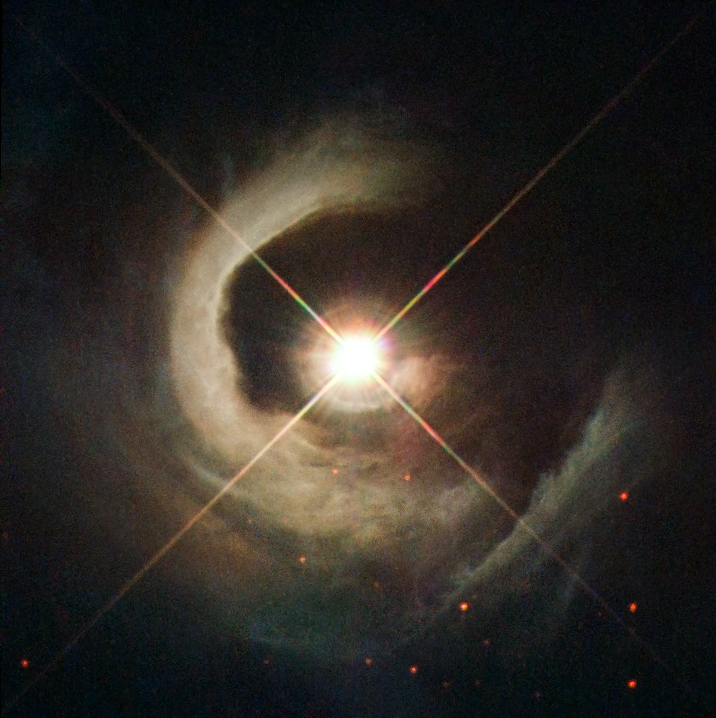

A young star takes centre stage

With its helical appearance resembling a snail’s shell, this reflection nebula seems to spiral out from a luminous central star in this new NASA/ESA Hubble Space Telescope image.

The star in the centre, known as V1331 Cyg and located in the dark cloud LDN 981 — or, more commonly, Lynds 981 — had previously been defined as a T Tauri star. A T Tauri is a young star — or Young Stellar Object — that is starting to contract to become a main sequence star similar to the Sun.

What makes V1331Cyg special is the fact that we look almost exactly at one of its poles. Usually, the view of a young star is obscured by the dust from the circumstellar disc and the envelope that surround it. However, with V1331Cyg we are actually looking in the exact direction of a jet driven by the star that is clearing the dust and giving us this magnificent view.

This view provides an almost undisturbed view of the star and its immediate surroundings allowing astronomers to study it in greater detail and look for features that might suggest the formation of a very
low-mass object in the outer circumstellar disc.

Credit: ESA/Hubble, NASA, Karl Stapelfeldt (GSFC), B. Stecklum and A. Choudhary (Thüringer Landessternwarte Tautenburg, Germany)